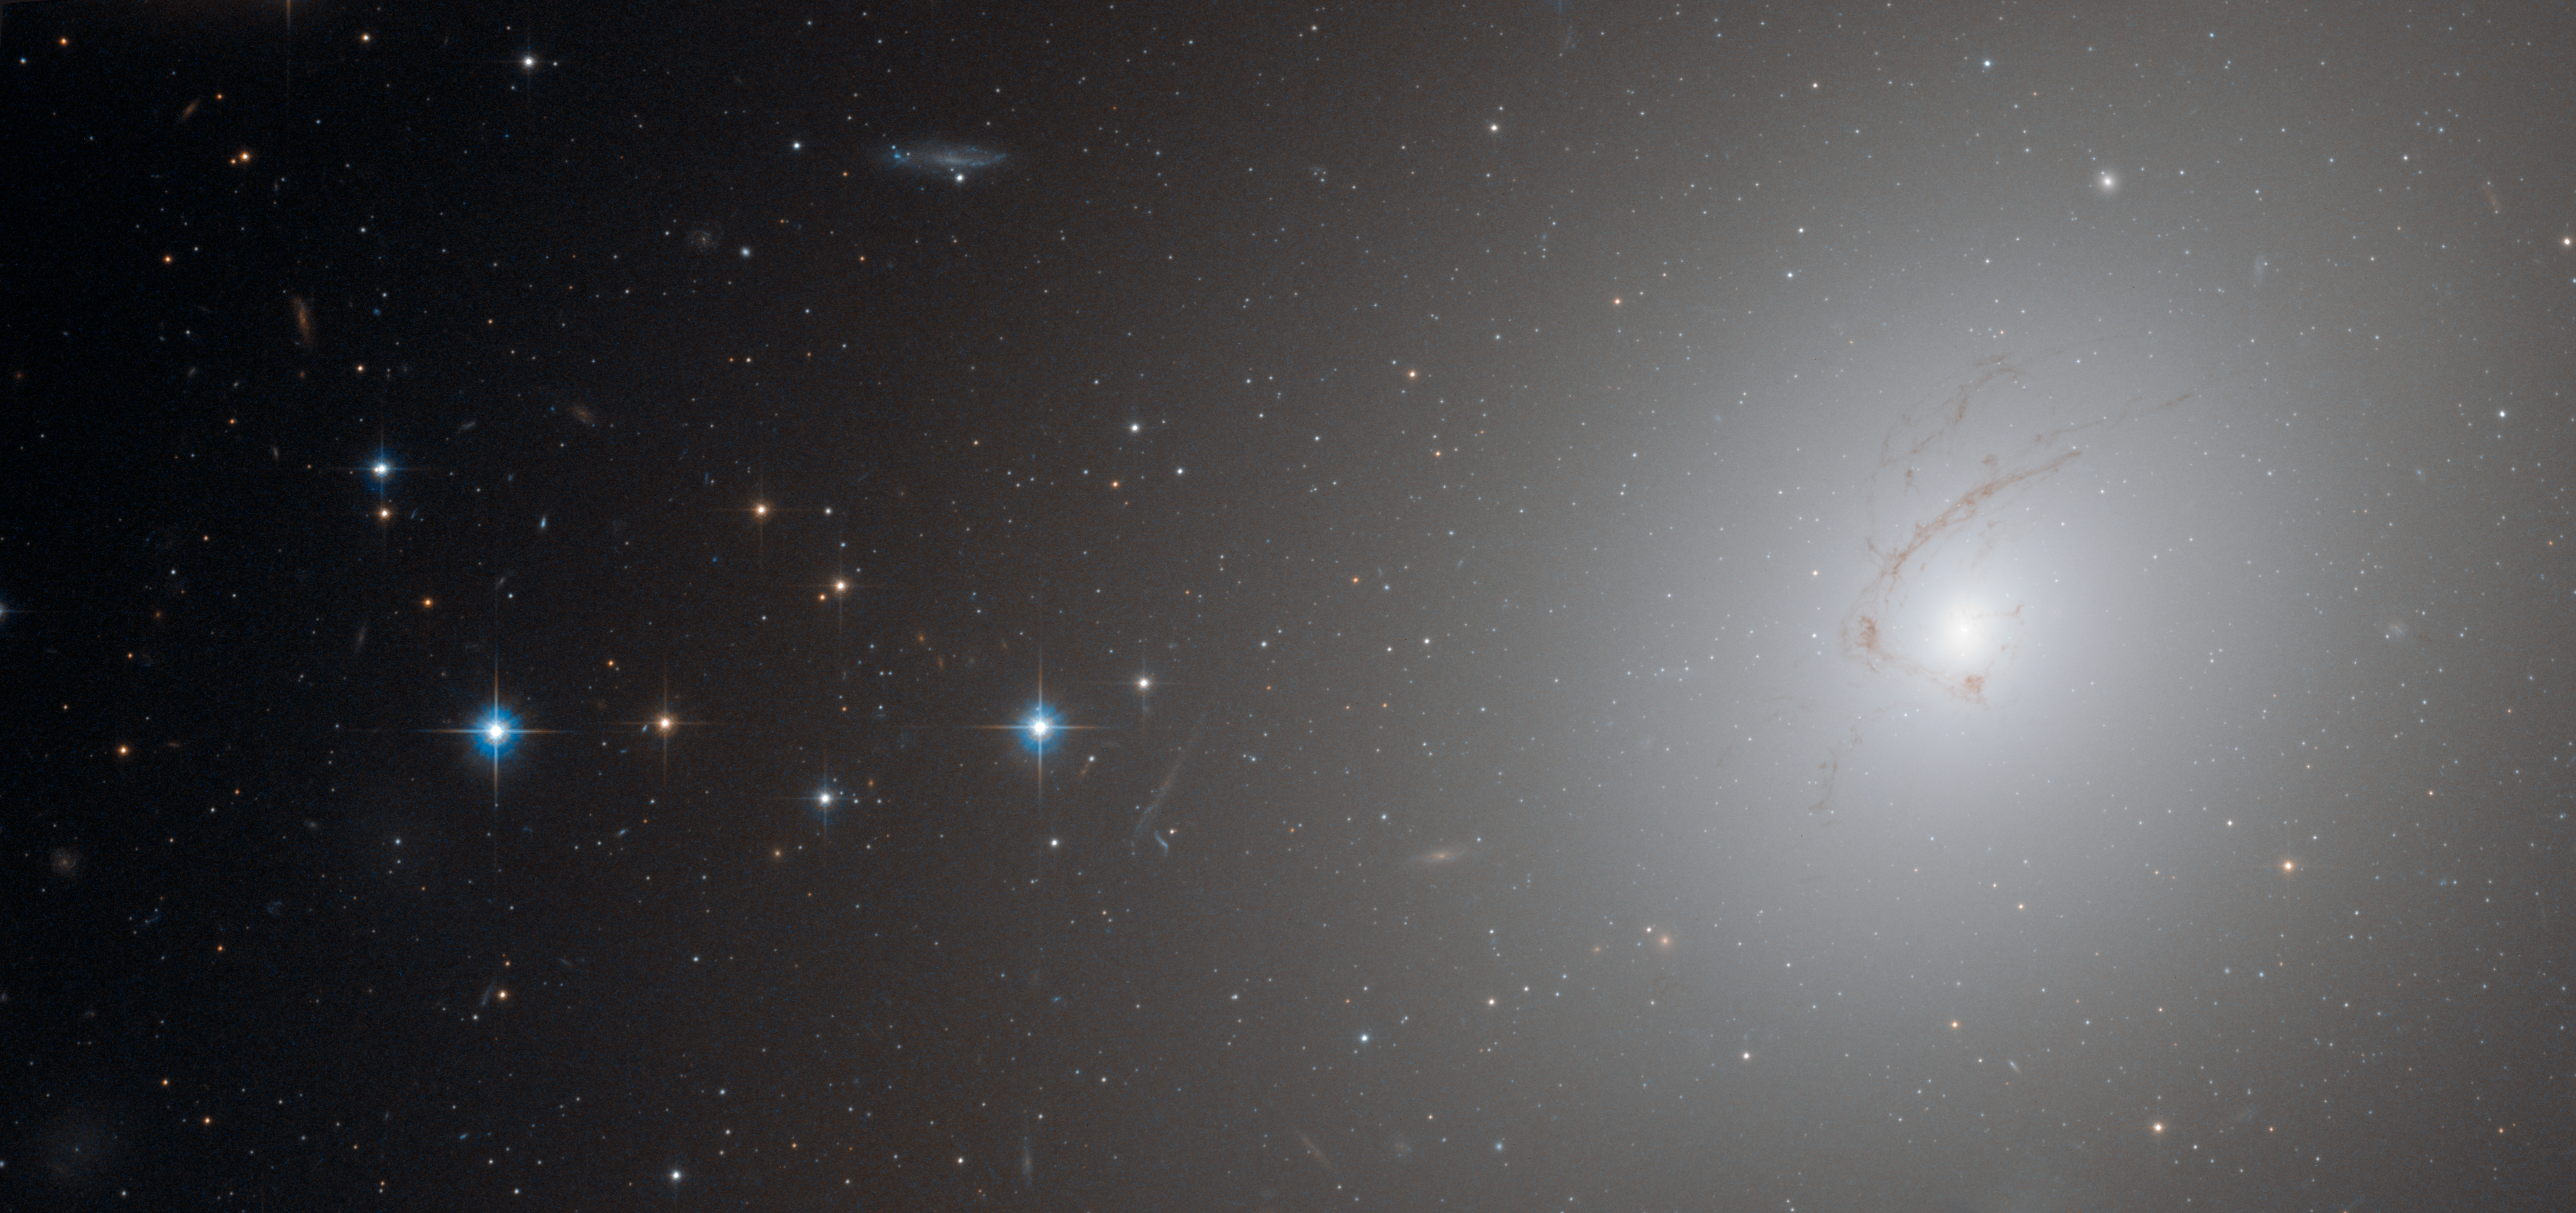

A cosmic question in NGC 4696

This picture, taken by Hubble’s Advanced Camera for Surveys, shows NGC 4696, the largest galaxy in the Centaurus Cluster.

The huge dust lane, around 30 000 light-years across, that sweeps across the face of the galaxy makes NGC 4696 look different from most other elliptical galaxies. Viewed at certain wavelengths, strange thin filaments of ionised hydrogen are visible within it. In this picture, these structures are visible as a subtle marbling effect across the galaxy’s bright centre.

Credit: ESA/Hubble and NASA